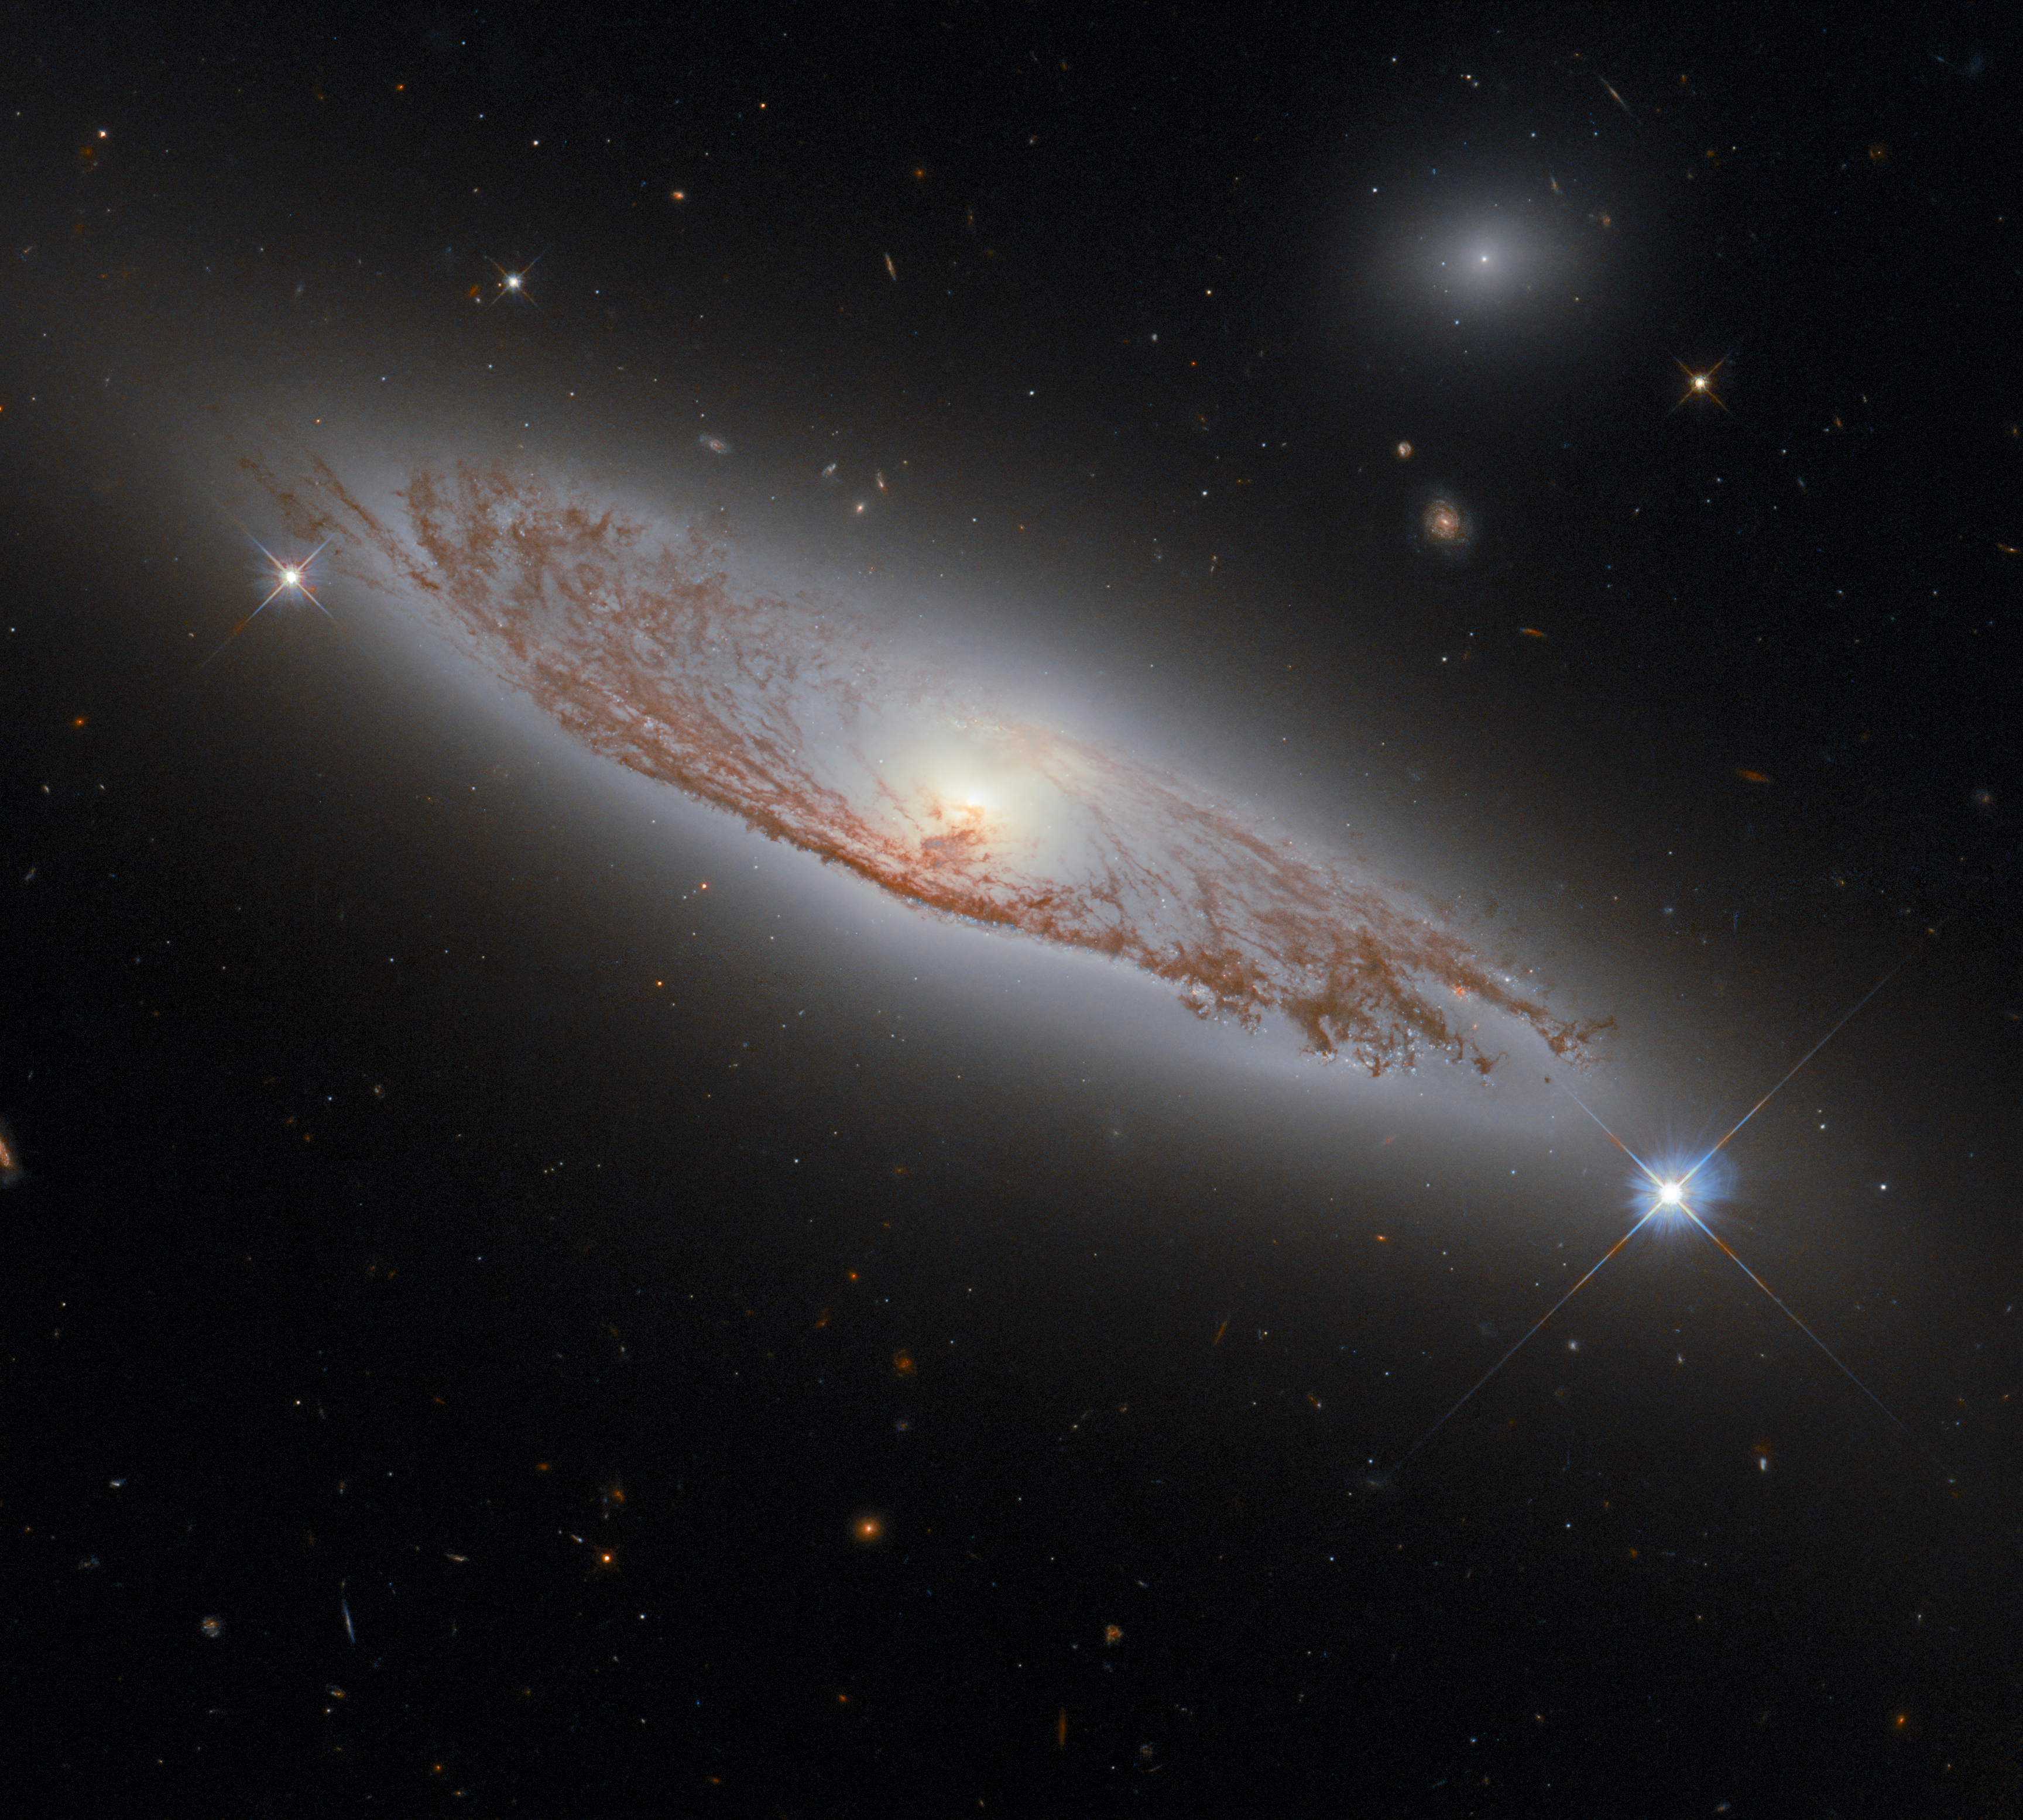

A Distant Spiral in Virgo

This image shows the spiral galaxy NGC 5037, which is found in the constellation of Virgo and was first documented by William Herschel in 1785. It lies about 150 million light-years away from Earth, and yet it is possible to see the delicate structures of gas and dust within the galaxy in extraordinary detail. This was made possible by Hubble’s Wide Field Camera 3 (WFC3), which was used to collect the exposures that were combined to create this image.

WFC3 is a very versatile camera, as it can collect ultraviolet, visible and infrared light, thereby providing a wealth of information about the objects that it observes. WFC3 was installed on Hubble by astronauts in 2009, during servicing mission 4, which was Hubble’s fifth and final servicing mission. Servicing mission 4 was intended to prolong Hubble’s life for another five years. 12 years later, both Hubble and WFC3 remain in active use!

Credit: ESA/Hubble & NASA, D. Rosario Acknowledgement: L. Shatz